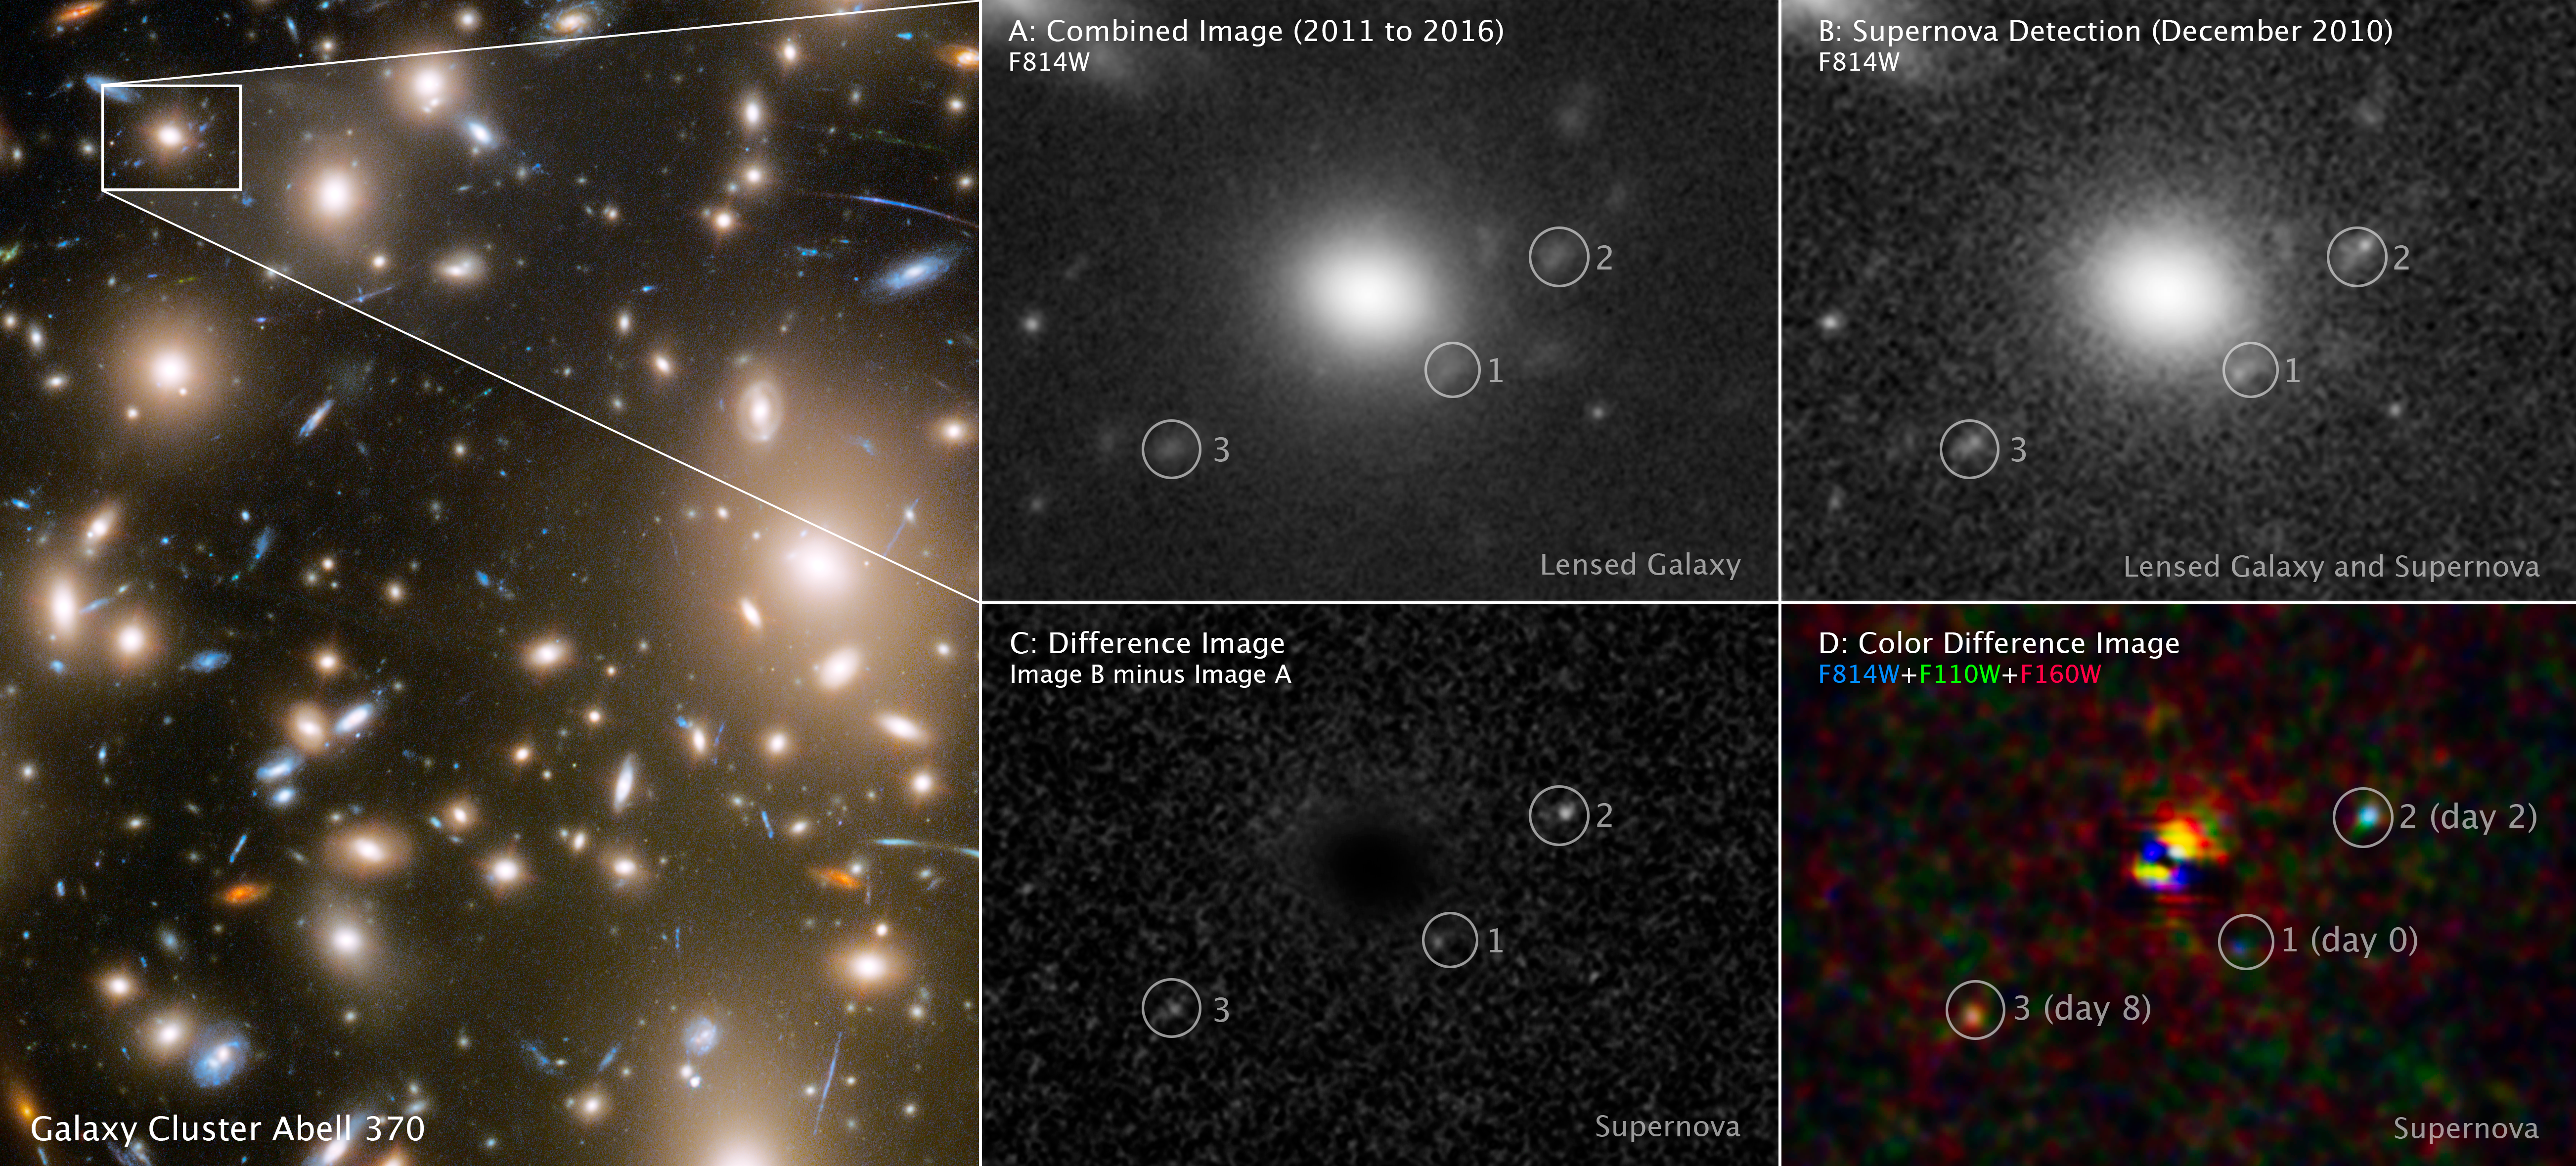

Three Faces of Evolving Supernova (Annotated)

As a result of a phenomenon called gravitational lensing, three different moments in a far-off supernova explosion were captured in a single snapshot by the NASA/ESA Hubble Space Telescope. The light from the supernova, which was located behind the galaxy cluster Abell 370, was multiply lensed by the cluster’s immense gravity. This light took three different paths through the cosmic lens of the massive cluster. The three paths were of three different lengths, so when the light arrived at Hubble (on the same day in December 2010), the supernova appeared at three different stages of evolution.

The left panel shows the portion of Abell 370 where the multiple images of the supernova appeared. Panel A, a composite of Hubble observations from 2011 to 2016, shows the locations of the multiply imaged host galaxy after the supernova faded. Panel B, a Hubble picture from December 2010, shows the three images of the host galaxy and the supernova at different phases in its evolution. Panel C, which subtracts the image in Panel B from that in Panel A, shows three different faces of the evolving supernova. Using a similar image subtraction process for multiple filters of data, Panel D shows the different colours of the cooling supernova at three different stages in its evolution.

Credit: NASA, ESA, STScI, Wenlei Chen (UMN), Patrick Kelly (UMN), Hubble Frontier Fields